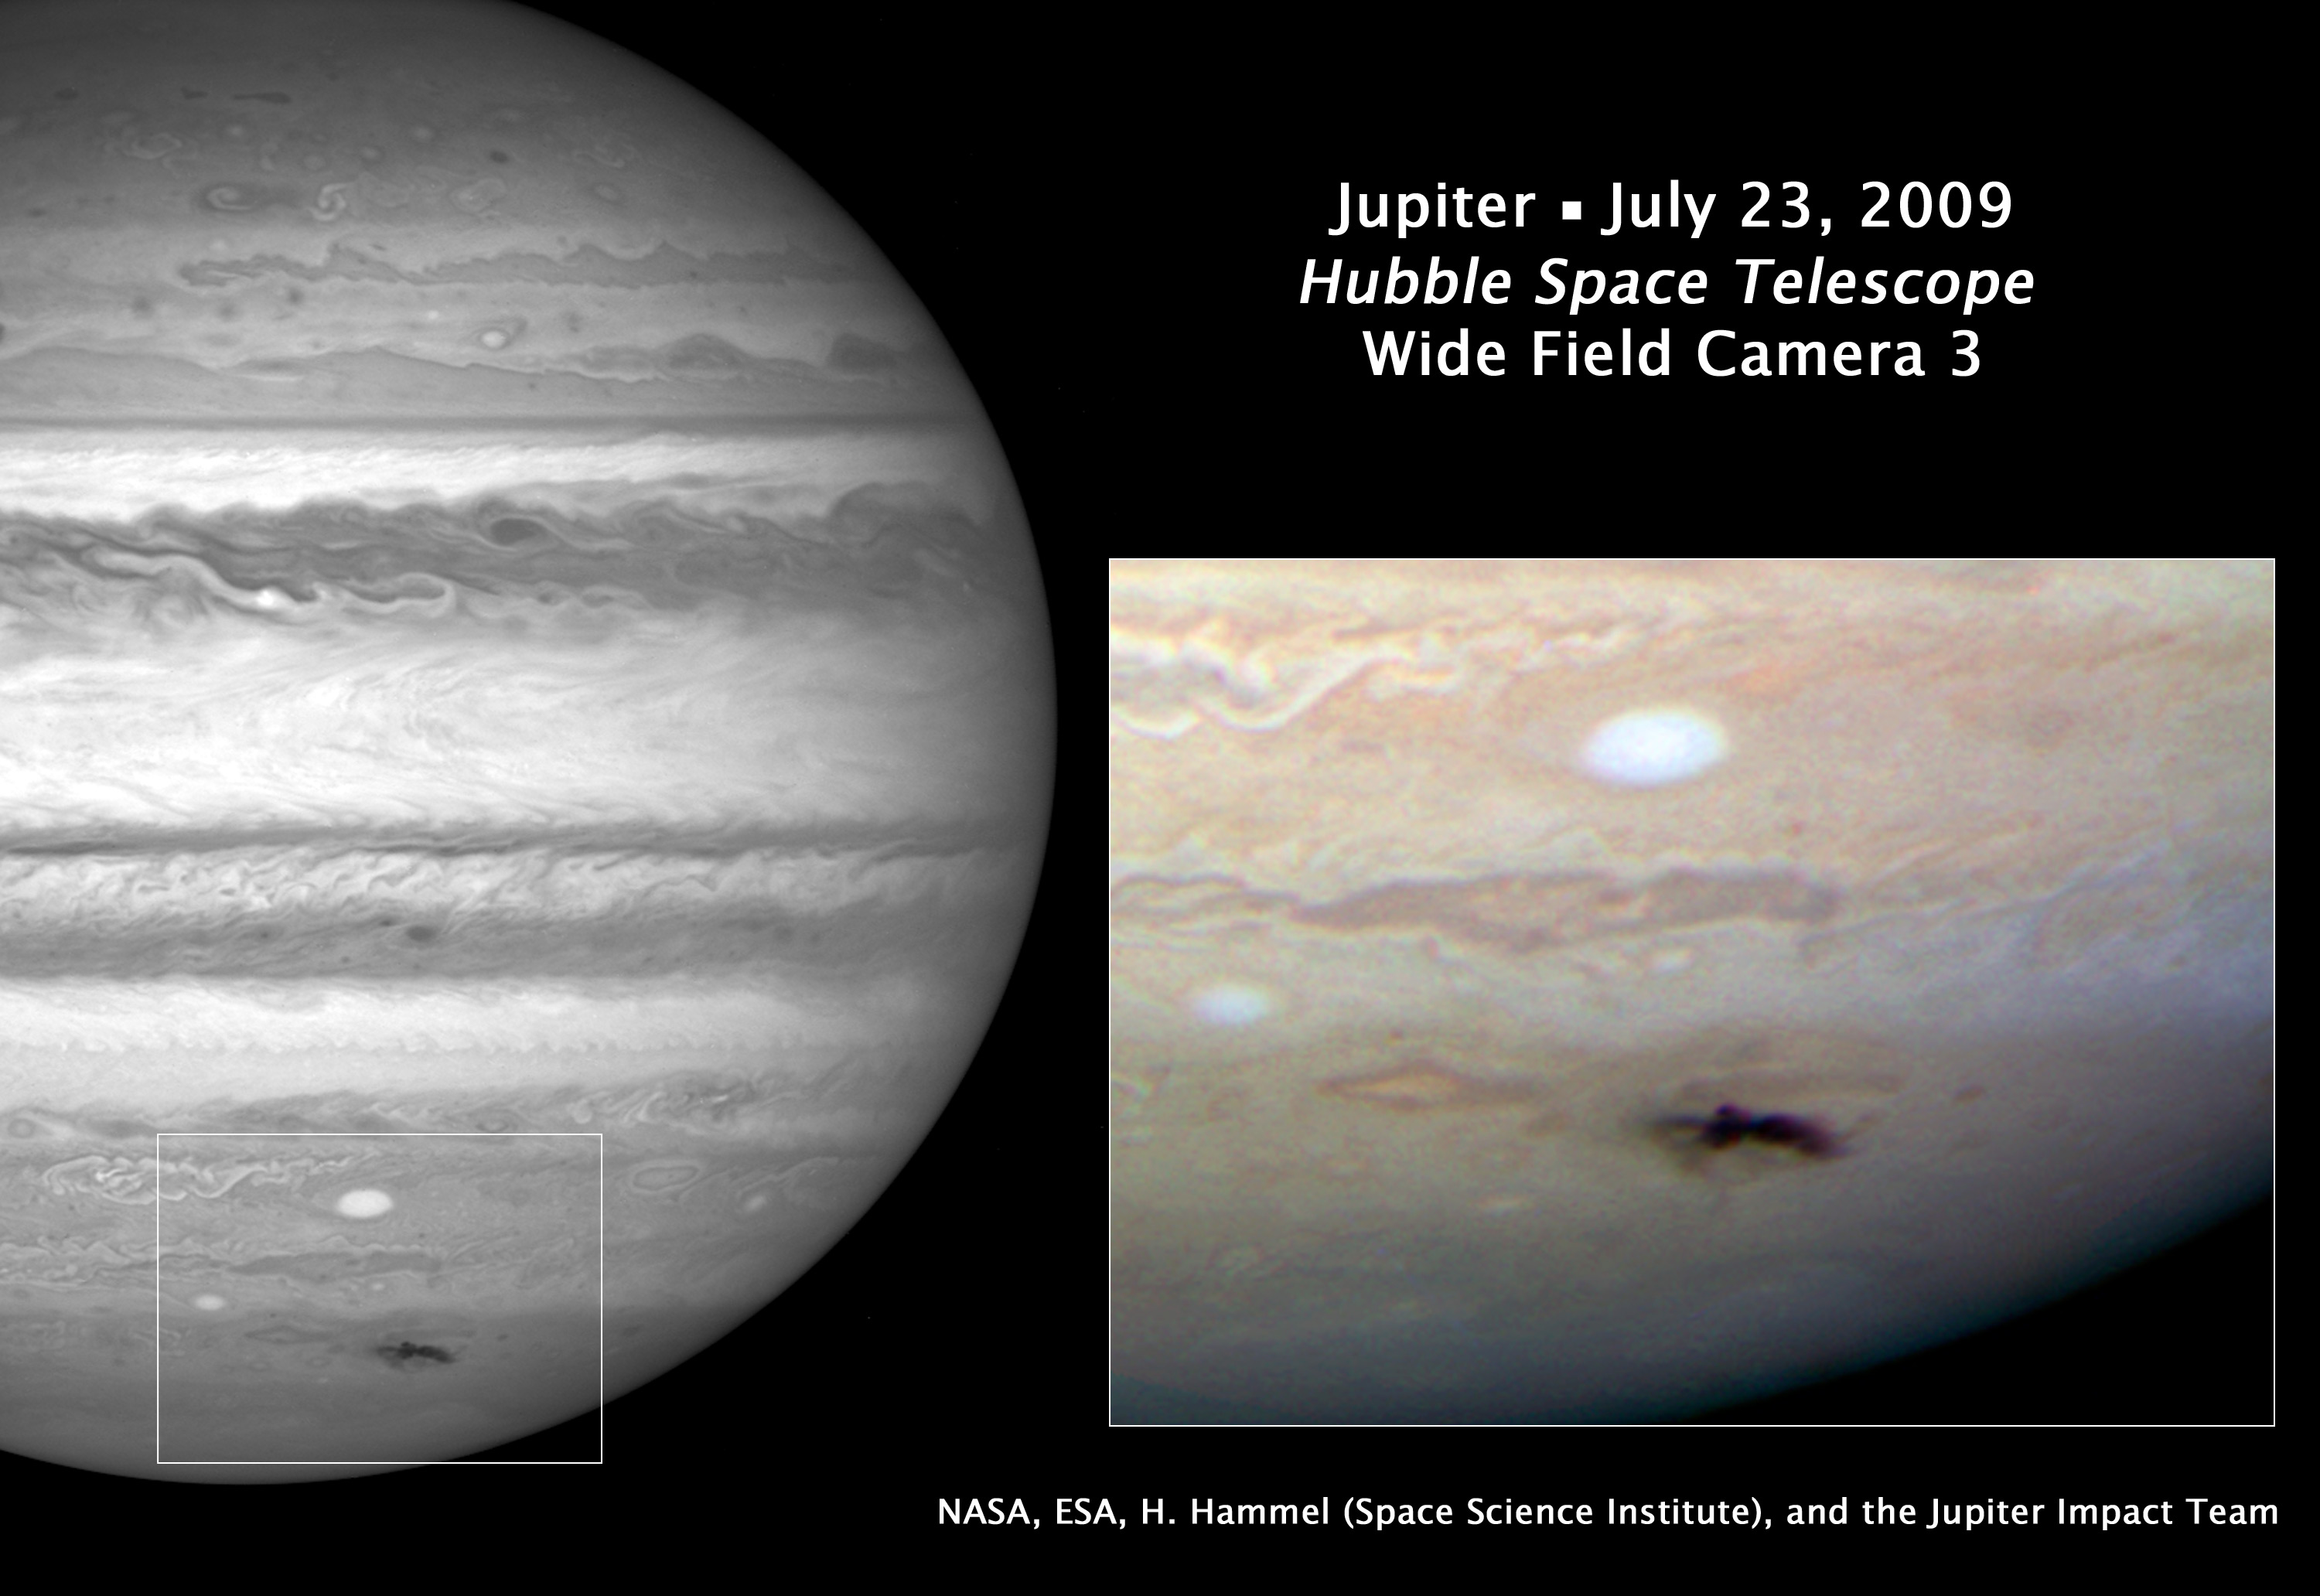

Hubble views new dark spot on Jupiter

This Hubble picture, taken on 23 July, is the sharpest visible-light picture taken of the atmospheric debris from a comet or asteroid that collided with Jupiter on 19 July. This is Hubble's first science observation following its repair and upgrade in May. The image was taken with the new Wide Field Camera 3.

The combination of the Hubble data with mid-infrared images from ground-based telescopes will give astronomers an insight into changes of the vertical structure of Jupiter's atmosphere due to the impact. The expanding spot is about twice the length of the whole of Europe.

First discovered by Australian amateur astronomer Anthony Wesley, the feature is the impact site and "backsplash" of material from a small object that plunged into Jupiter's atmosphere and disintegrated.

The only other time in history such a feature has been seen on Jupiter was in 1994 during the collision of fragments from comet Shoemaker-Levy 9. The spot looks strikingly similar to comet Shoemaker-Levy 9's impact features. The details seen in the Hubble view shows lumpiness in the debris plume caused by turbulence in Jupiter's atmosphere.

The impactor is estimated to be the size of several football fields. The force of the explosion on Jupiter was thousands of times more powerful than the suspected comet or asteroid that exploded in June 1908 over the Tunguska River Valley in Siberia.

This is a natural colour image of Jupiter as seen in visible light.

Credit: NASA, ESA and H. Hammel (Space Science Institute, Boulder, Colorado) and the Jupiter Comet Impact Team